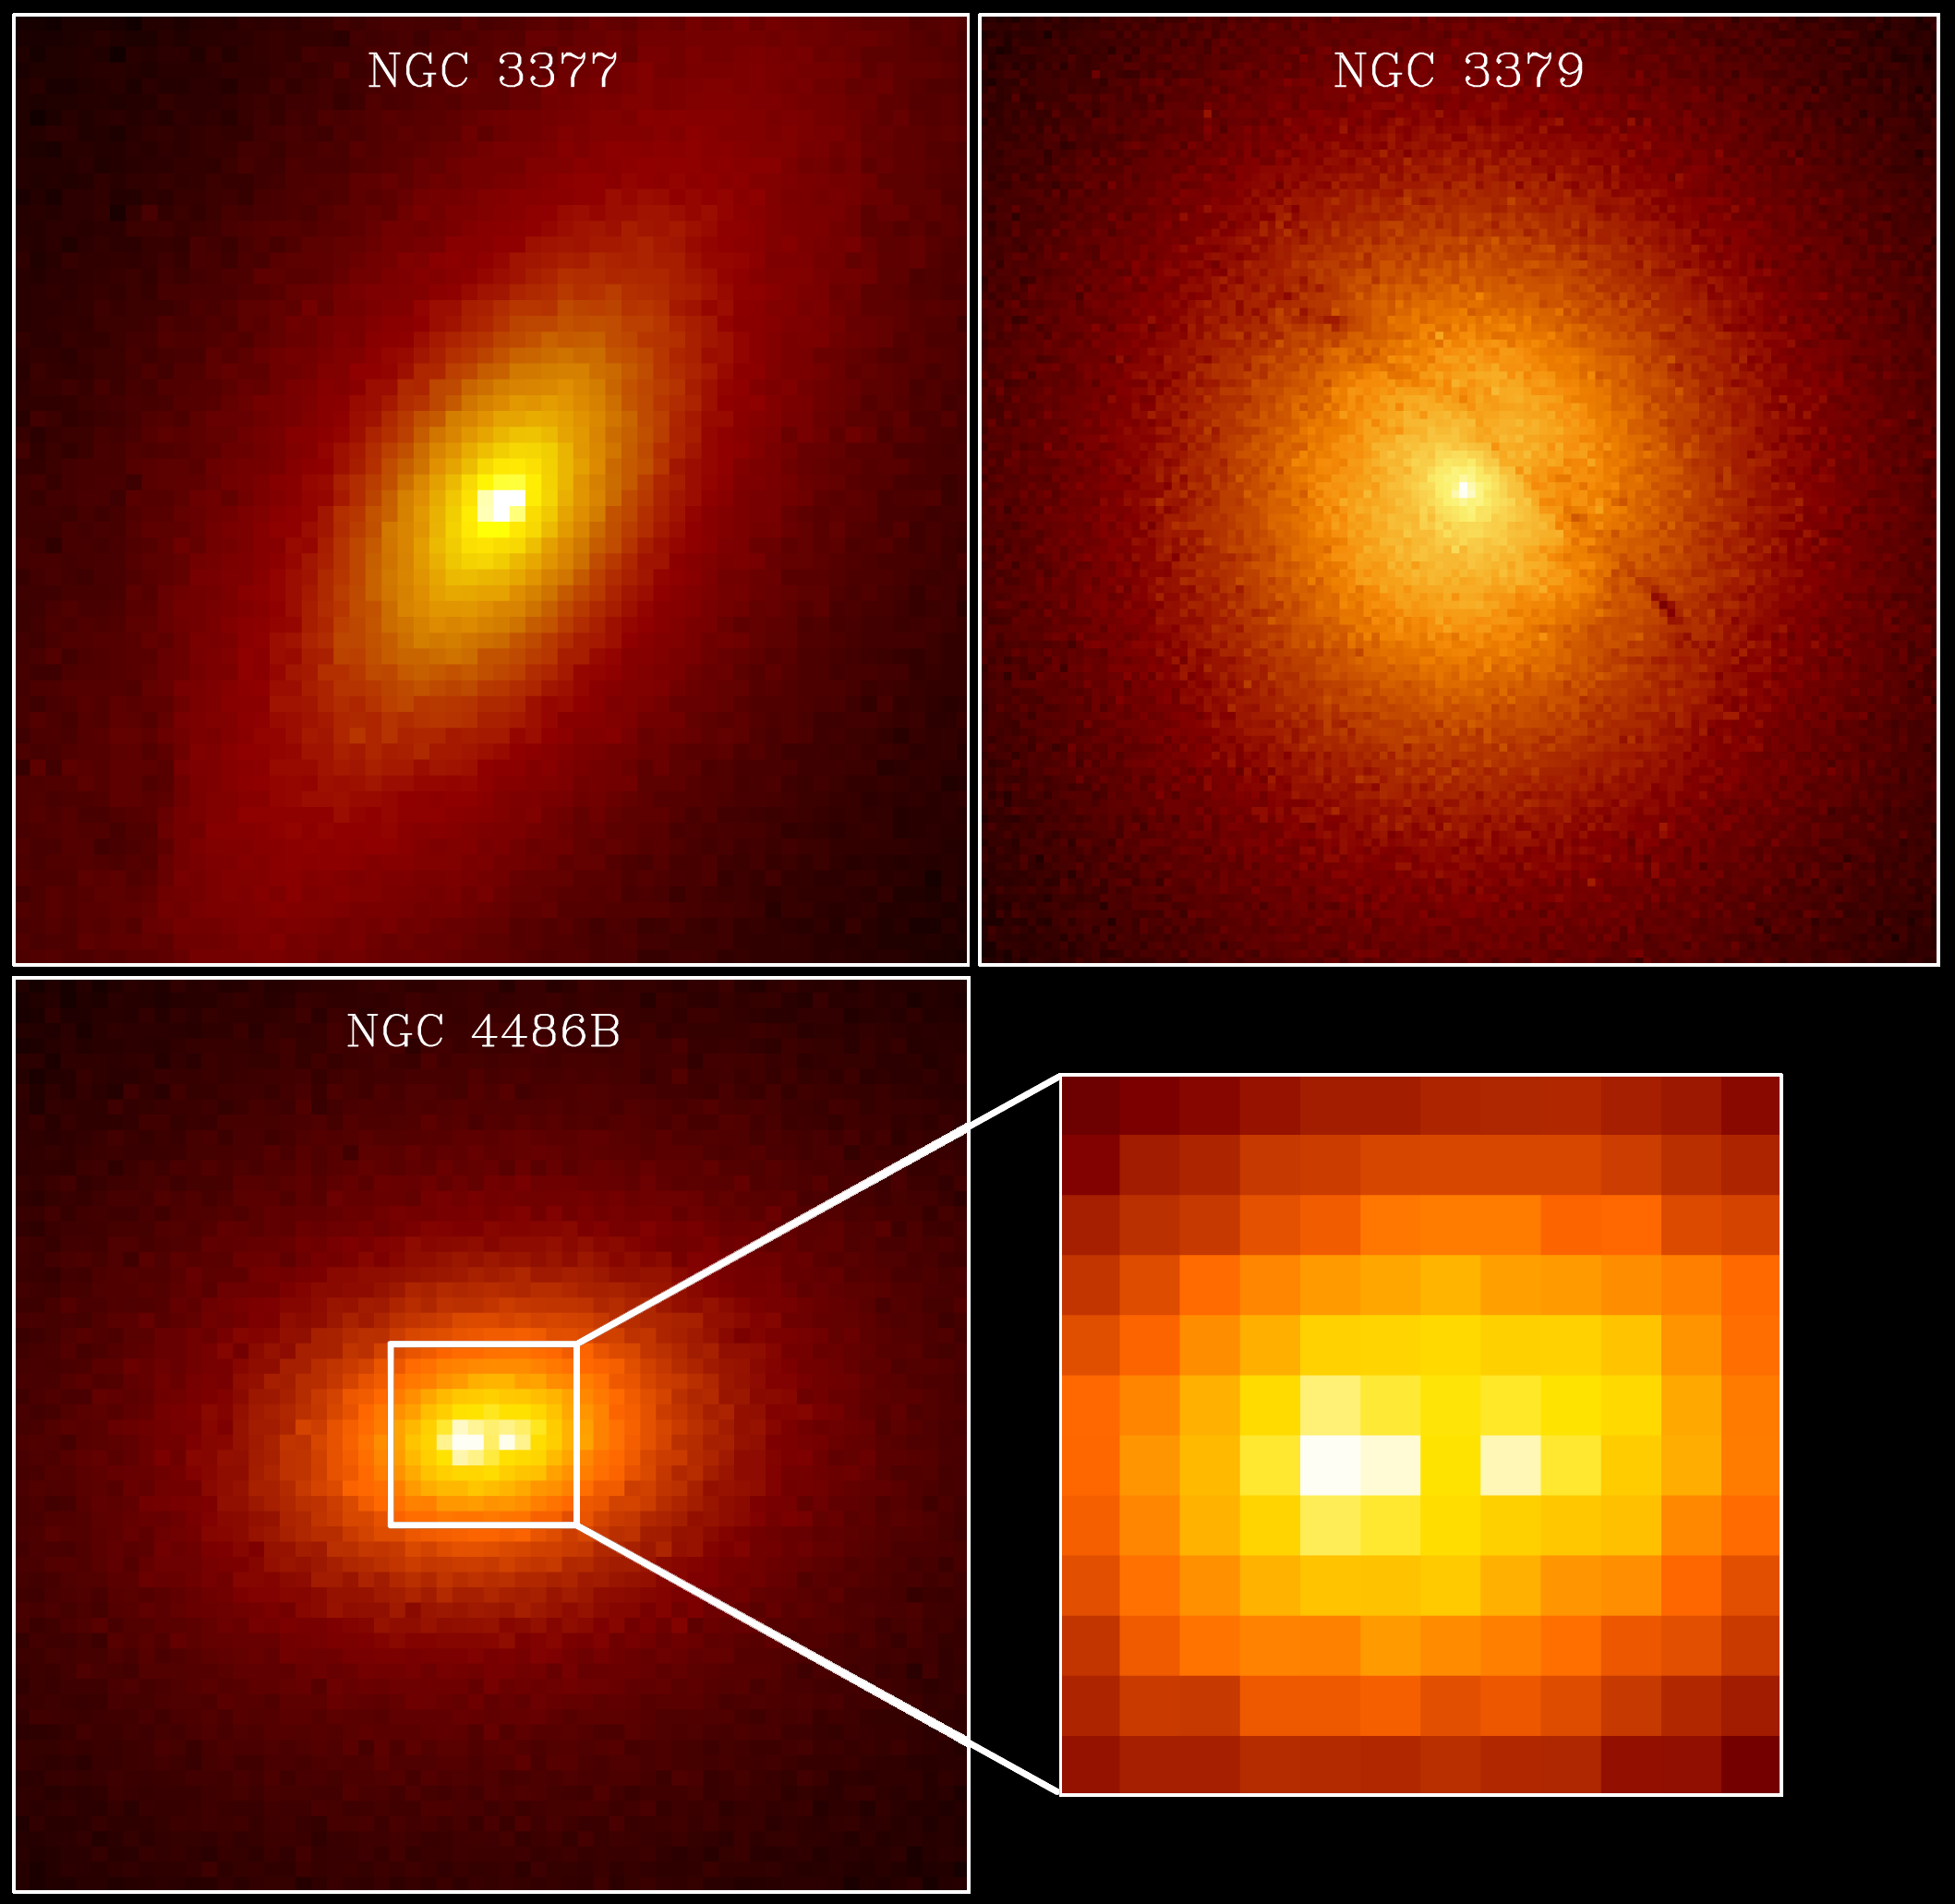

Massive Black Holes In Galaxies NGC 3377, NGC 3379 And NGC 4486b

The three galaxies above are believed to contain central, supermassive black holes. The galaxy NGC 4486B (lower-left) shows a double nucleus (lower-right). The images of NGC 3377 and NGC 4486B are 2.7 arcseconds on a side, and for NGC 3379 the size is 5.4 arcseconds; the lower-right is a blow-up of the central 0.5 arcseconds of NGC 4486B.

Credit: Karl Gebhardt (University of Michigan) and Tod Lauer (NOAO)